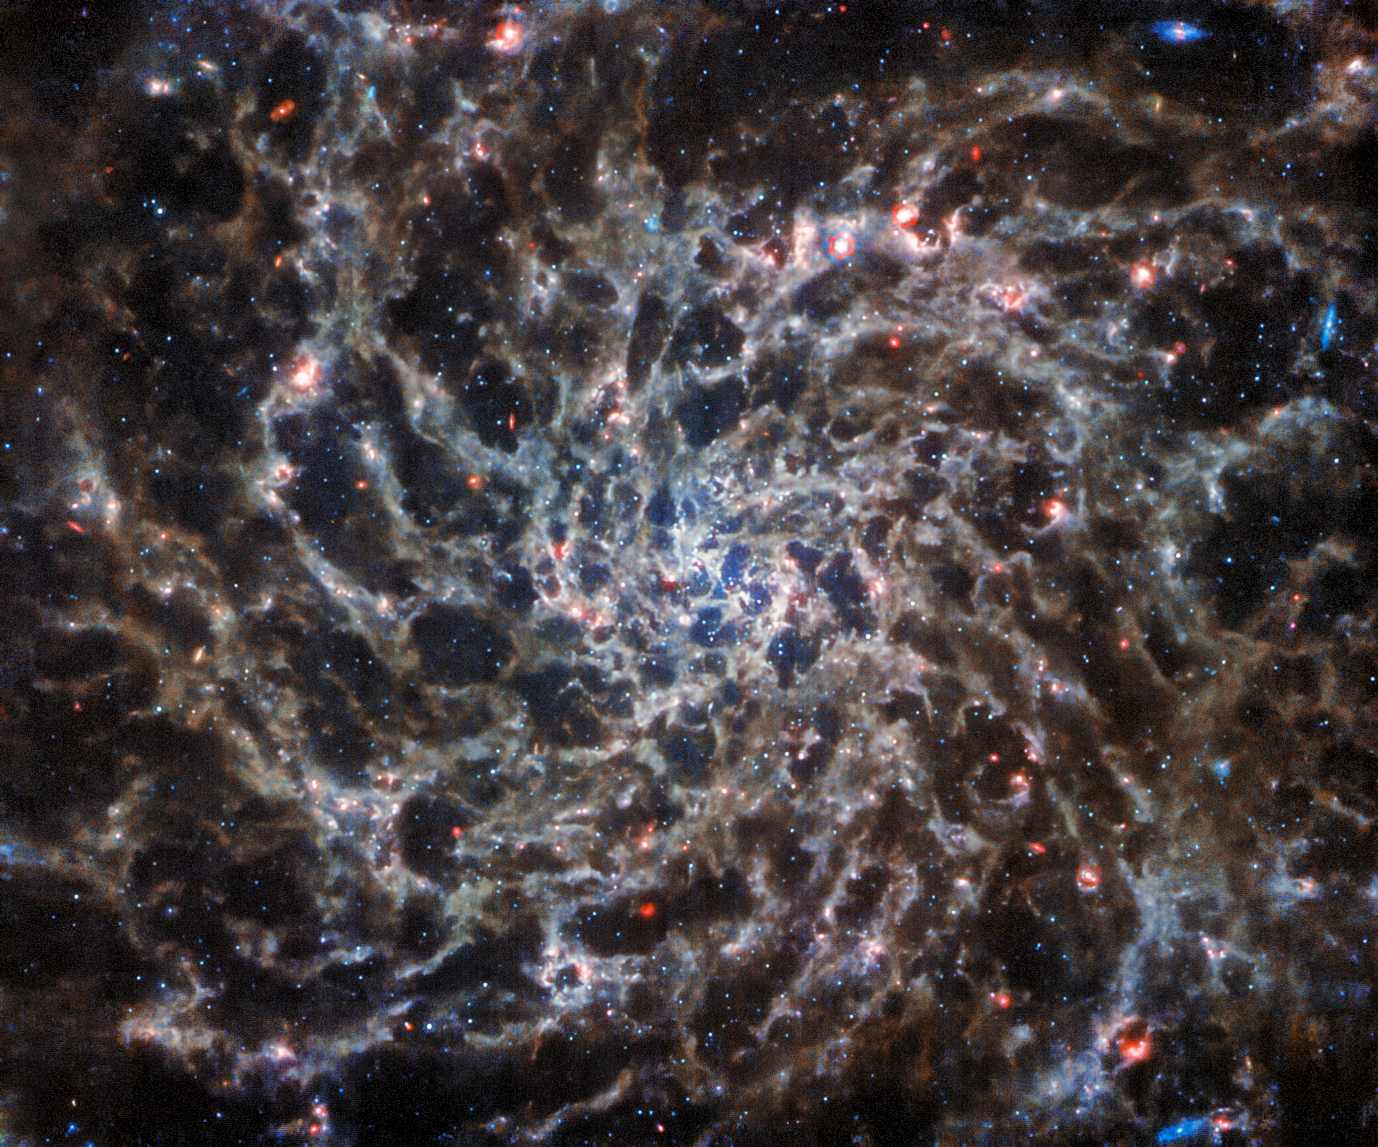

Webb Reveals Complex Galactic Structures

This image from the NASA/ESA/CSA James Webb Space Telescope shows IC 5332, a spiral galaxy, in unprecedented detail thanks to observations from the Mid-InfraRed Instrument (MIRI). Its symmetrical spiral arms, which appear so clearly in Hubble’s ultraviolet and visible-light image of IC 5332, are revealed as a complex web of gas, emitting infrared light at a variety of temperatures. Capturing light at these wavelengths requires very specialised instruments kept at very cold temperatures, and MIRI performs spectacularly at the task.

IC 5332 lies over 29 million light-years from Earth, and has a diameter of roughly 66 000 light-years, making it about a third smaller than the Milky Way. It is notable for being almost perfectly face-on with respect to Earth, allowing us to admire the symmetrical sweep of its spiral arms.

Credit: ESA/Webb, NASA & CSA, J. Lee and the PHANGS-JWST and PHANGS-HST Teams